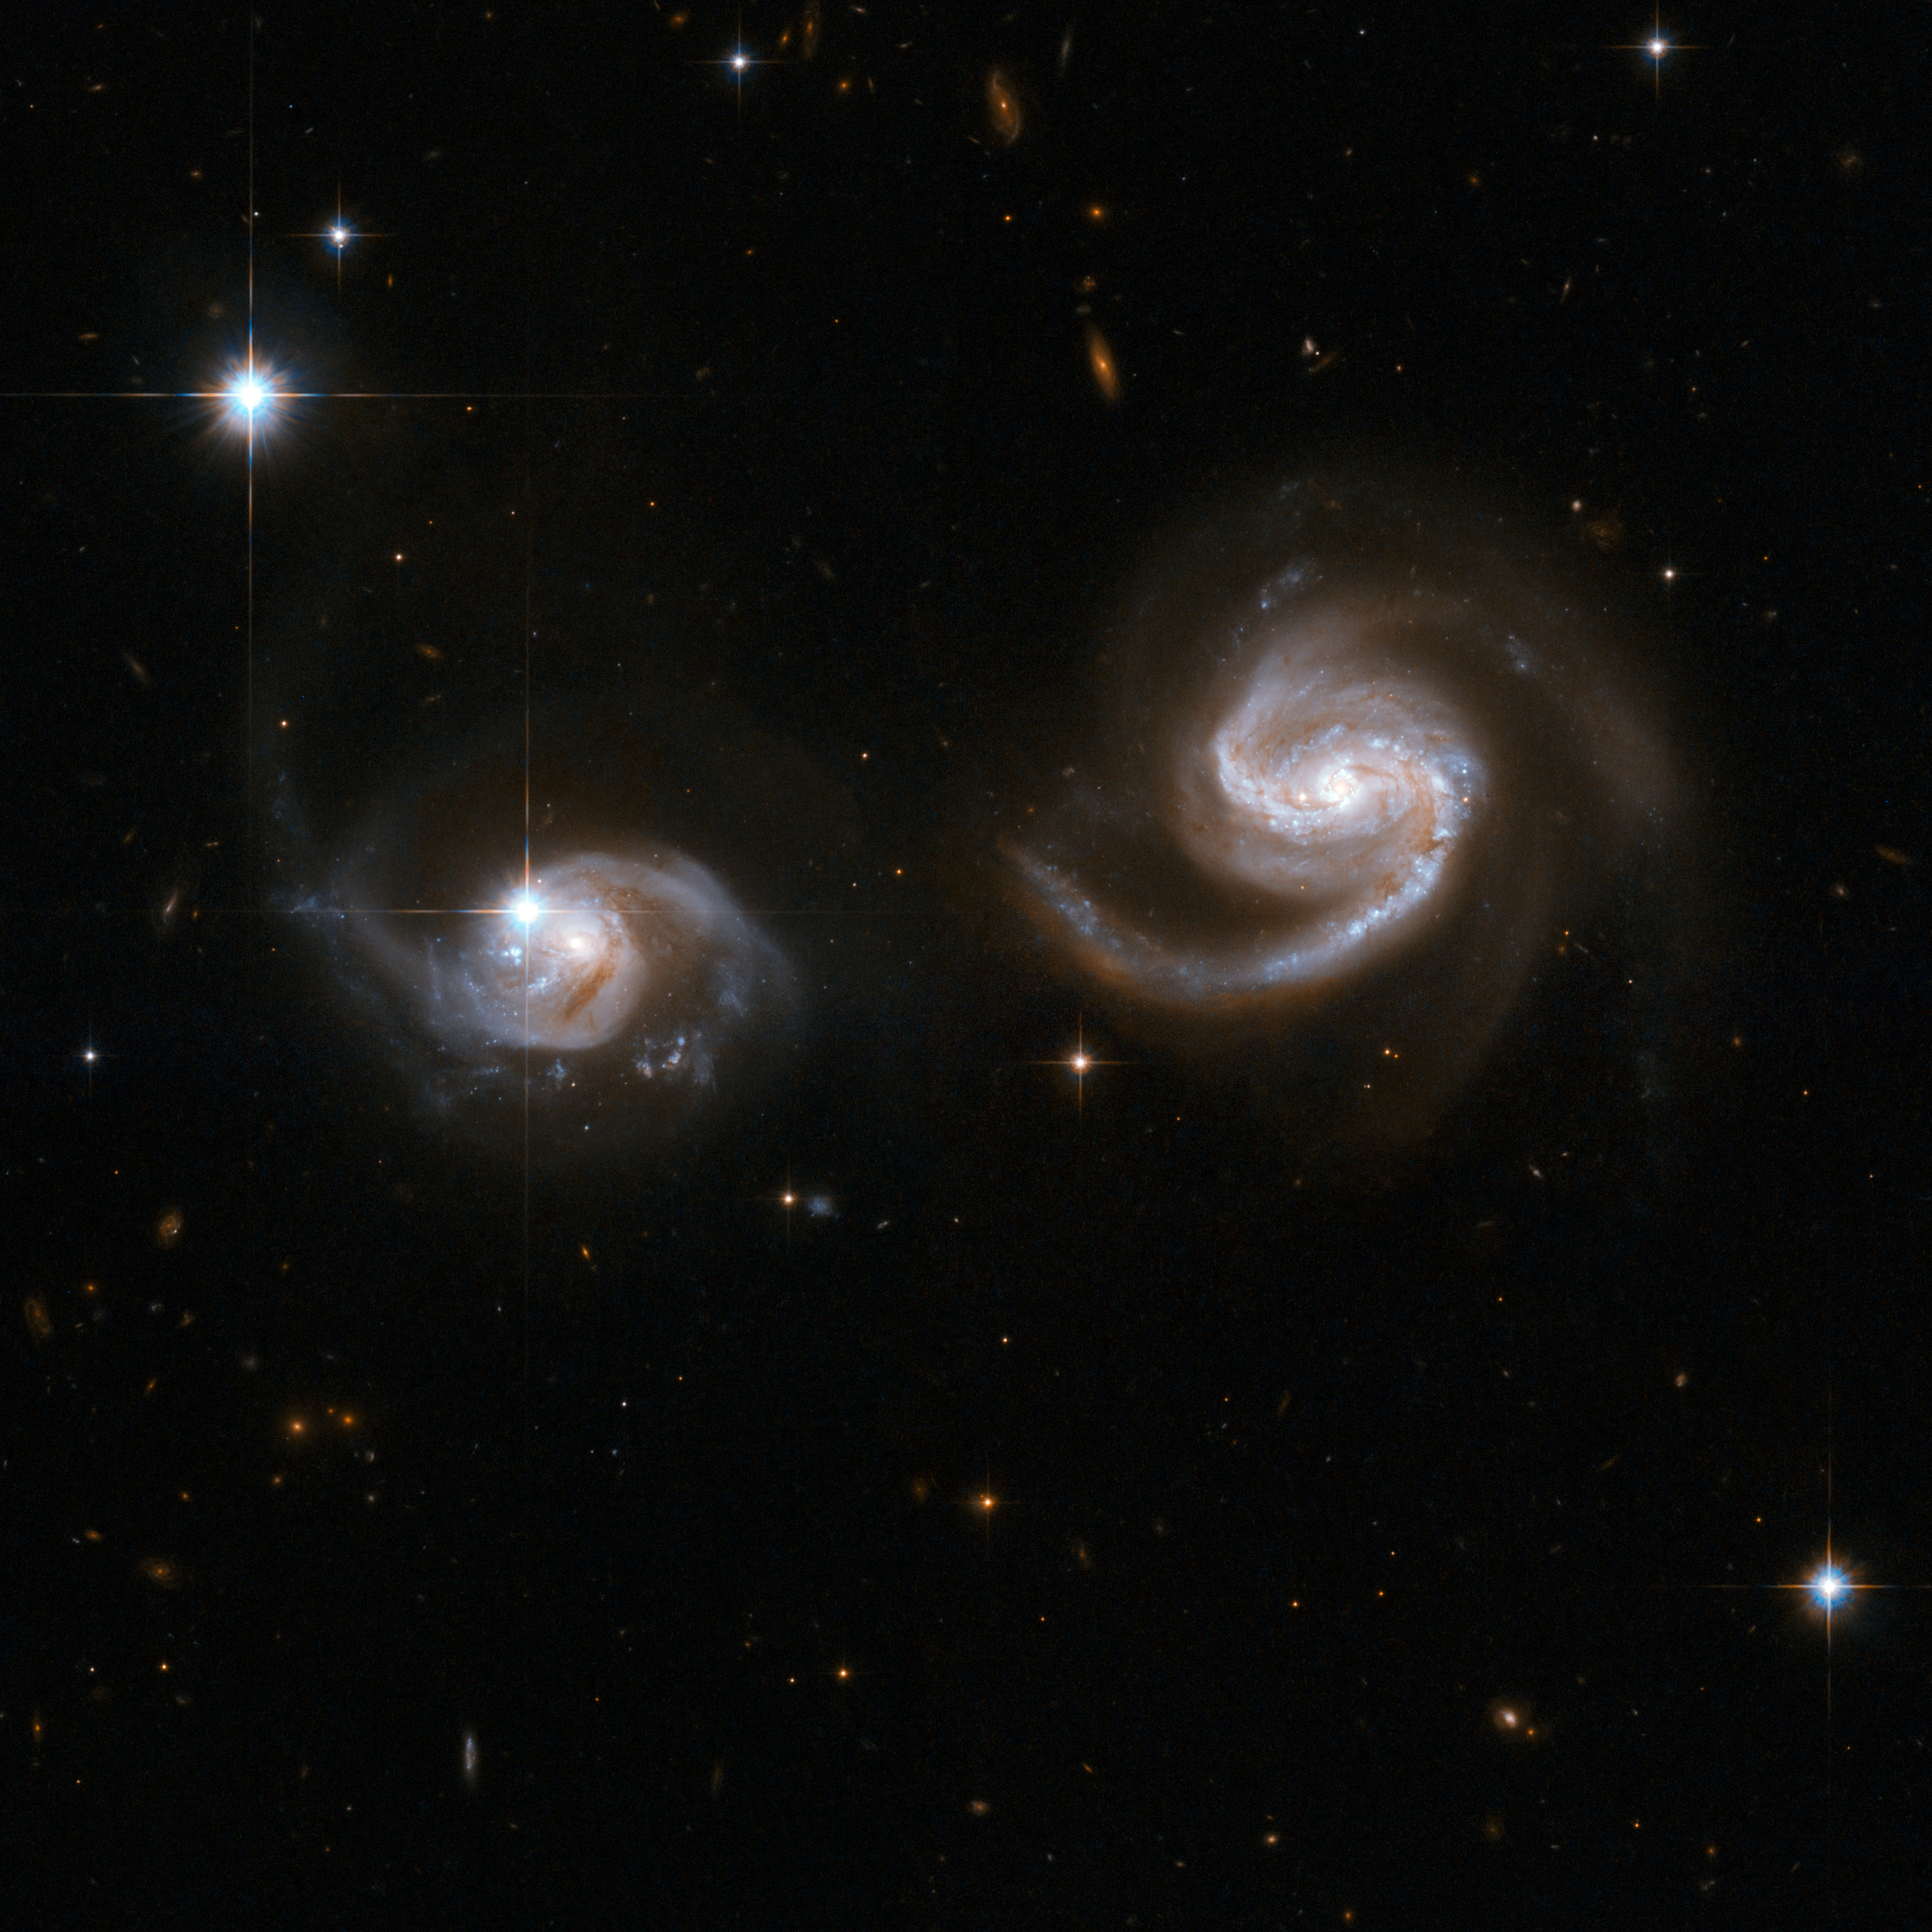

NGC 6786

This Hubble image displays a beautiful pair of interacting spiral galaxies with swirling arms. The smaller of the two, dubbed LEDA 62867 and positioned to the left of the frame, seems to be safe for now, but will probably be swallowed by the larger spiral galaxy, NGC 6786 (to the right), eventually. There is already some disturbance visible in both components. The pair is number 538 in Karachentsev's Catalogue of Pairs of Galaxies. A supernova was seen to explode in the large spiral in 2004. NGC 6786 is located in the constellation of Draco, the Dragon, about 350 million light-years away.

This image is part of a large collection of 59 images of merging galaxies taken by the Hubble Space Telescope and released on the occasion of its 18th anniversary on 24th April 2008.

Credit: NASA, ESA, the Hubble Heritage Team (STScI/AURA)-ESA/Hubble Collaboration and A. Evans (University of Virginia, Charlottesville/NRAO/Stony Brook University)